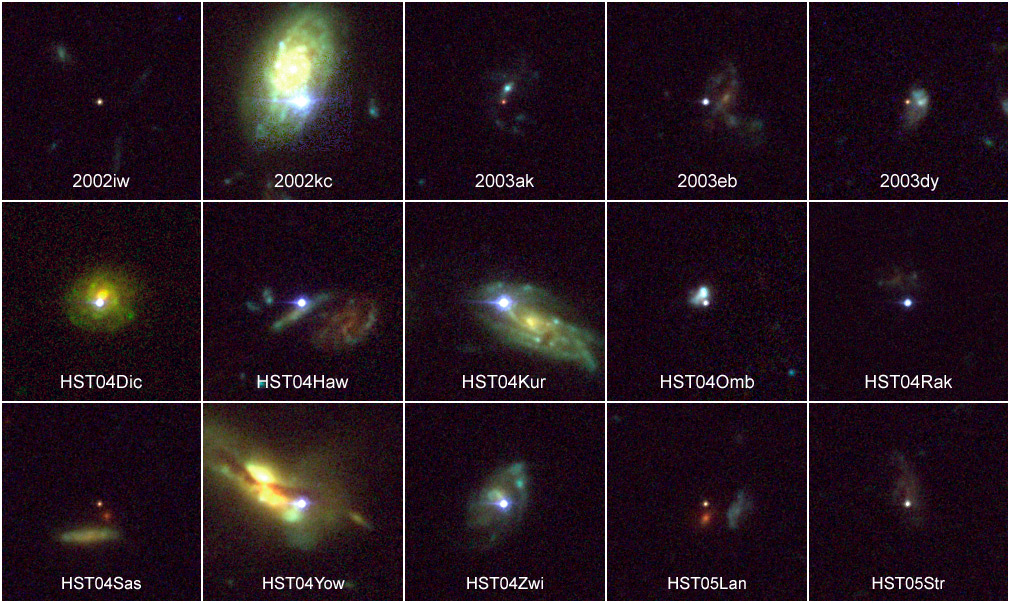

15 Distant Supernovae

Supernovae are extremely luminous and cause a burst of radiation that often briefly outshines an entire galaxy, before fading from view over several weeks or months. During this short interval a supernova can radiate as much energy as the Sun is expected to emit over its entire life span.

Credit: NASA, ESA, and A. Riess (STScI)